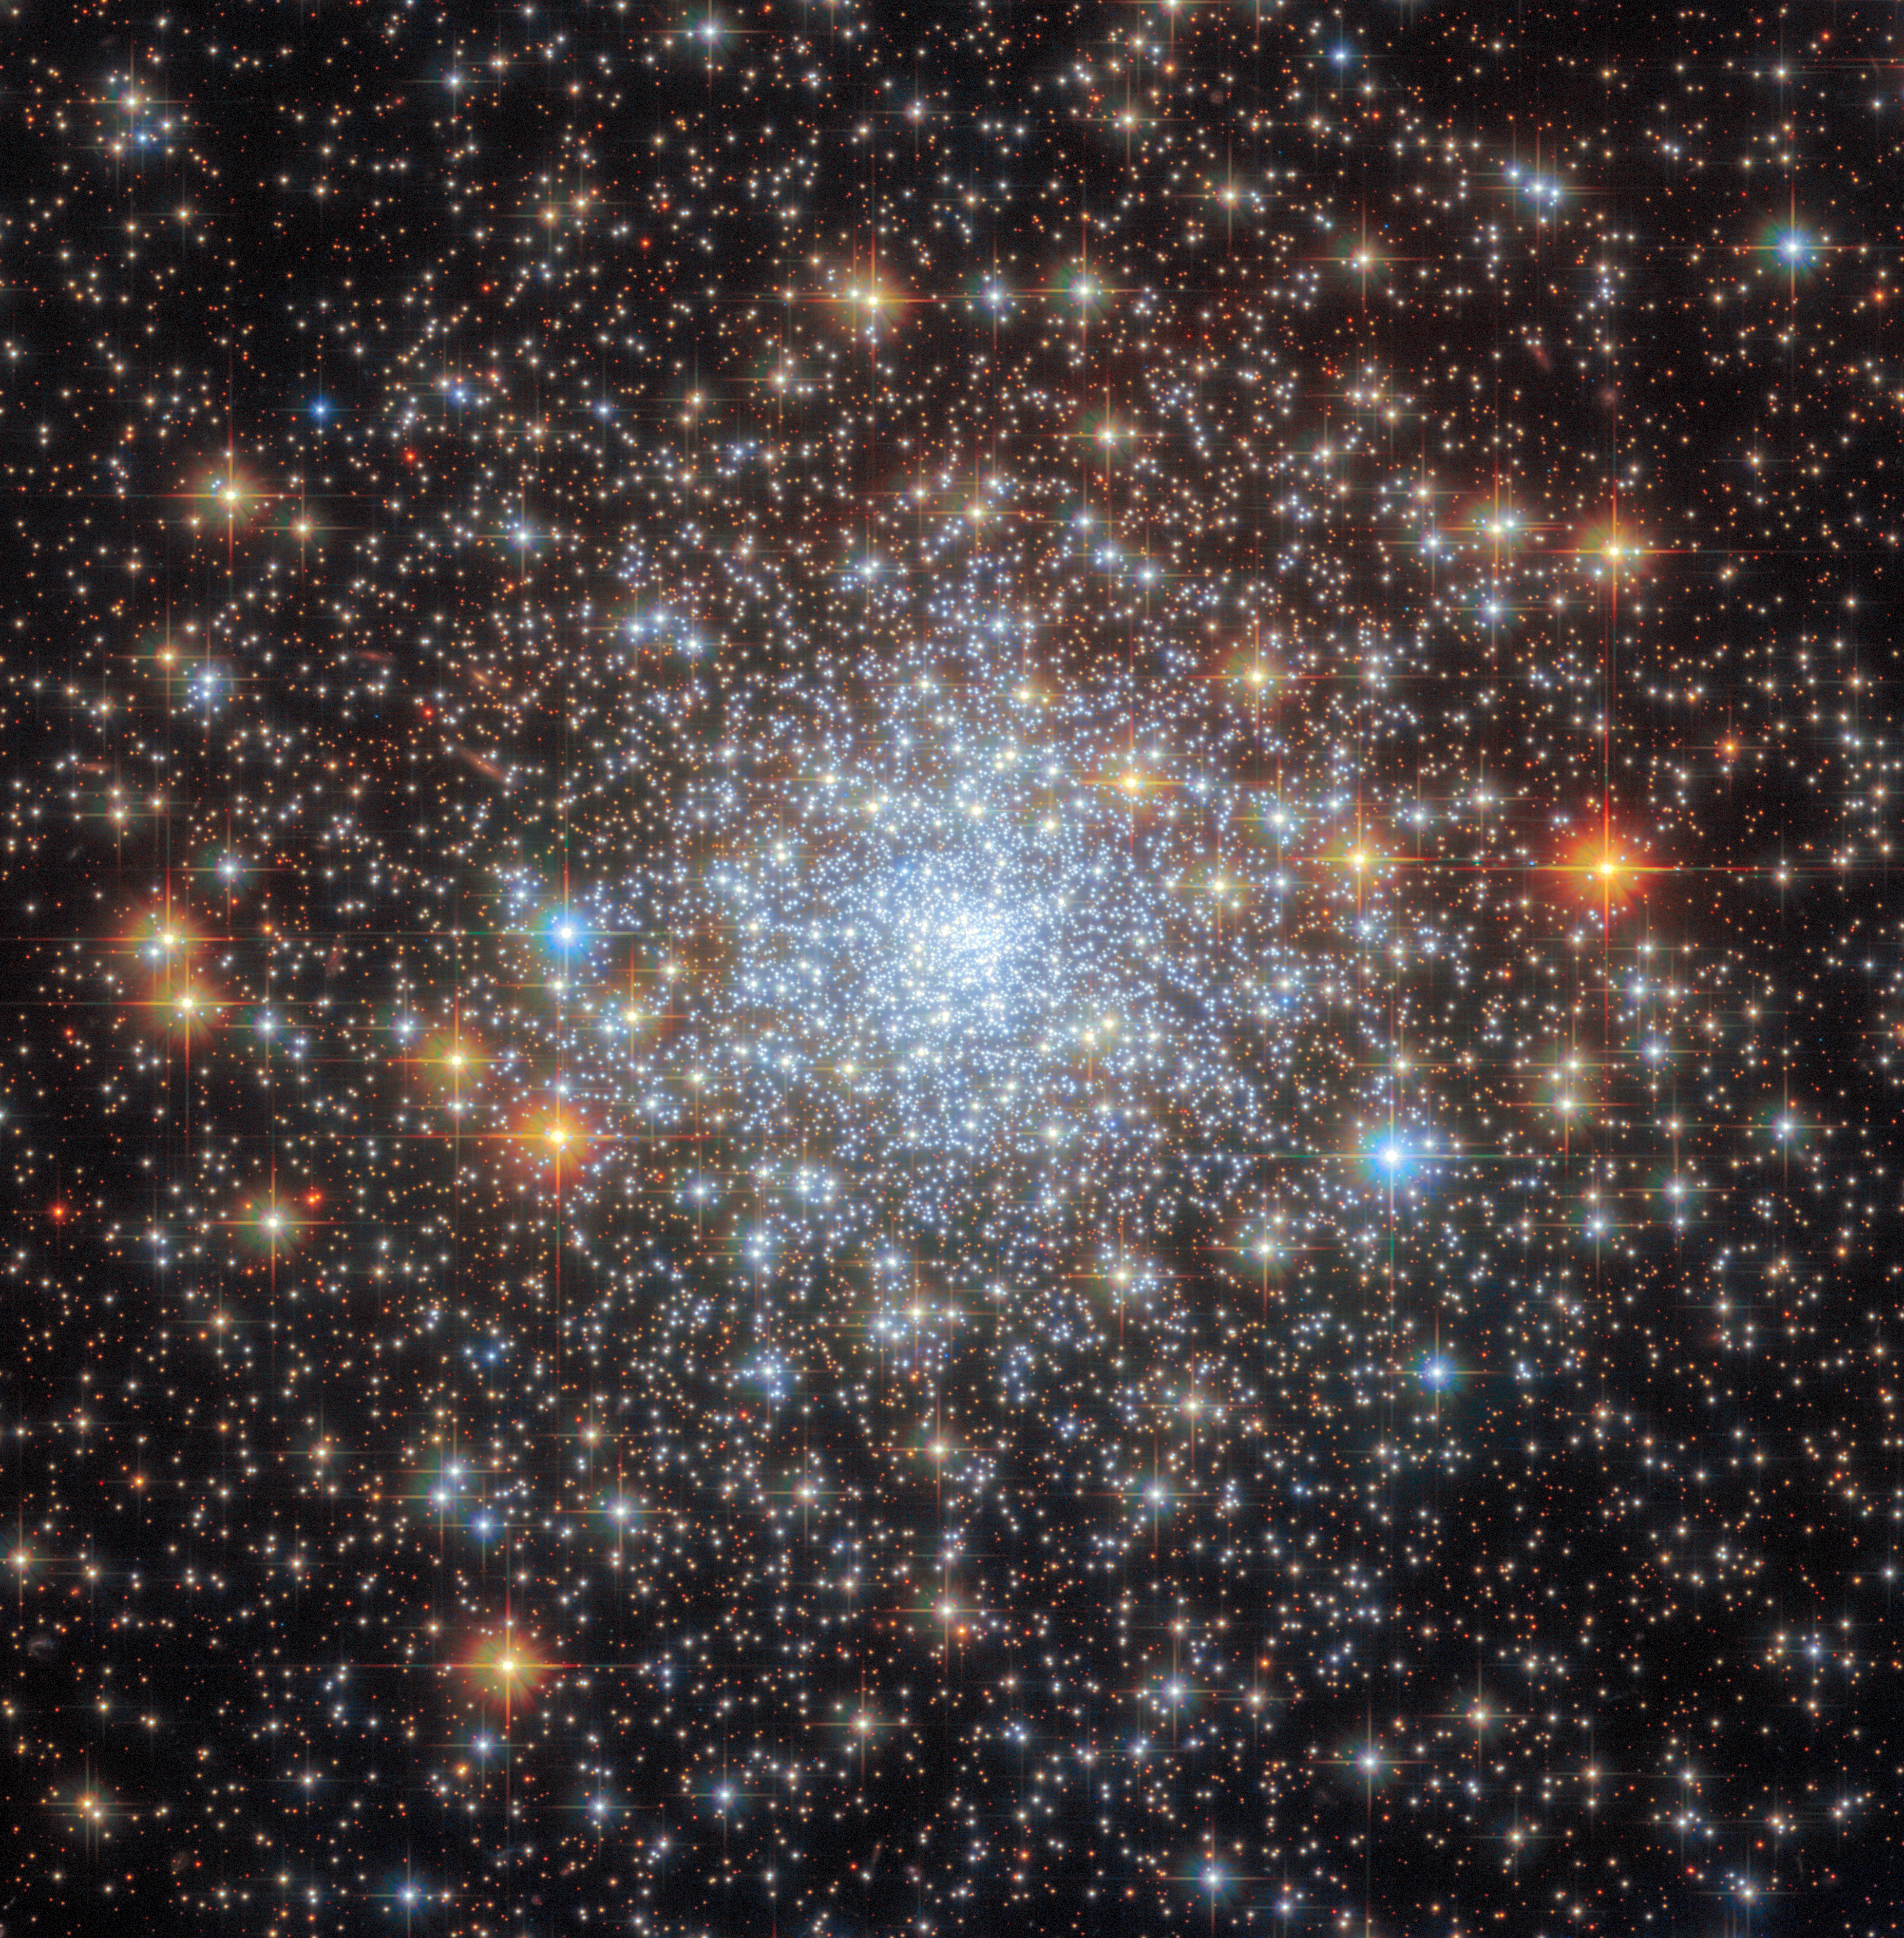

NGC 6652

The glittering, glitzy contents of the globular cluster NGC 6652 sparkle in this star-studded image from the NASA/ESA Hubble Space Telescope. The core of the cluster is suffused with the pale blue light of countless stars, and a handful of particularly bright foreground stars are adorned with criss-crossing diffraction spikes. NGC 6652 lies in our own Milky Way galaxy in the constellation Sagittarius, just under 30 000 light-years from Earth and only 6500 light-years from the Galactic centre.

Globular clusters are stable, tightly gravitationally bound clusters containing anywhere between tens of thousands and millions of stars. The intense gravitational attraction between the closely packed stars in globular clusters is what gives these star-studded objects their regular, spherical shape.

This image combines data from two of Hubble’s third-generation instruments; the Advanced Camera for Surveys and Wide Field Camera 3. As well as two instruments, this image draws on two different observing programmes from two different teams of astronomers. The first team set out to survey globular clusters in the Milky Way galaxy in the hope of shedding light on topics ranging from the ages of these objects to the gravitational potential of the galaxy as a whole. The second team of astronomers used a trio of exquisitely sensitive filters in Hubble’s Wide Field Camera 3 to disentangle the proportions of carbon, nitrogen, and oxygen in globular clusters such as NGC 6652.

Credit: ESA/Hubble & NASA, A. Sarajedini, G. Piotto